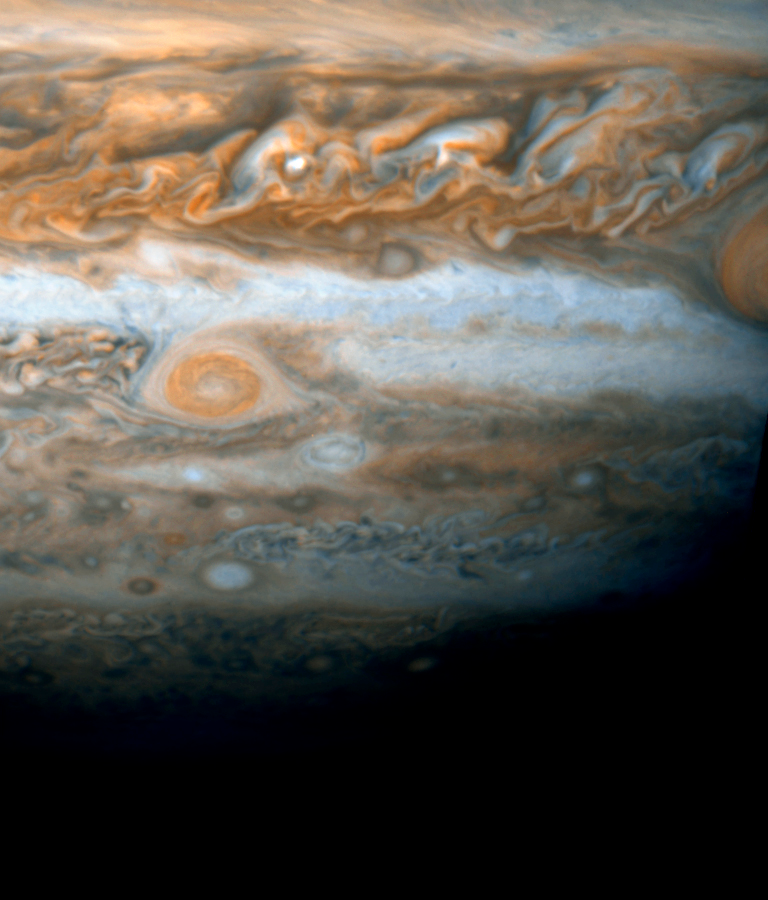

Jupiter's New Red Spot - HST ACS/HRC: April 8, 2006

Image of the partial disk of Jupiter from ACS/HRC on April 8, 2006 at 02:33UT. This contrast-enhanced image was taken in blue (F435W) and red (F656N) light. The group involved with the observation was led by Amy Simon-Miller (NASA GoddardSpace Flight Center), Glenn Orton (Jet Propulsion Laboratory) and Nancy Chanover (New Mexico State University).

Credit: NASA, ESA, and A. Simon-Miller (NASA/GSFC)